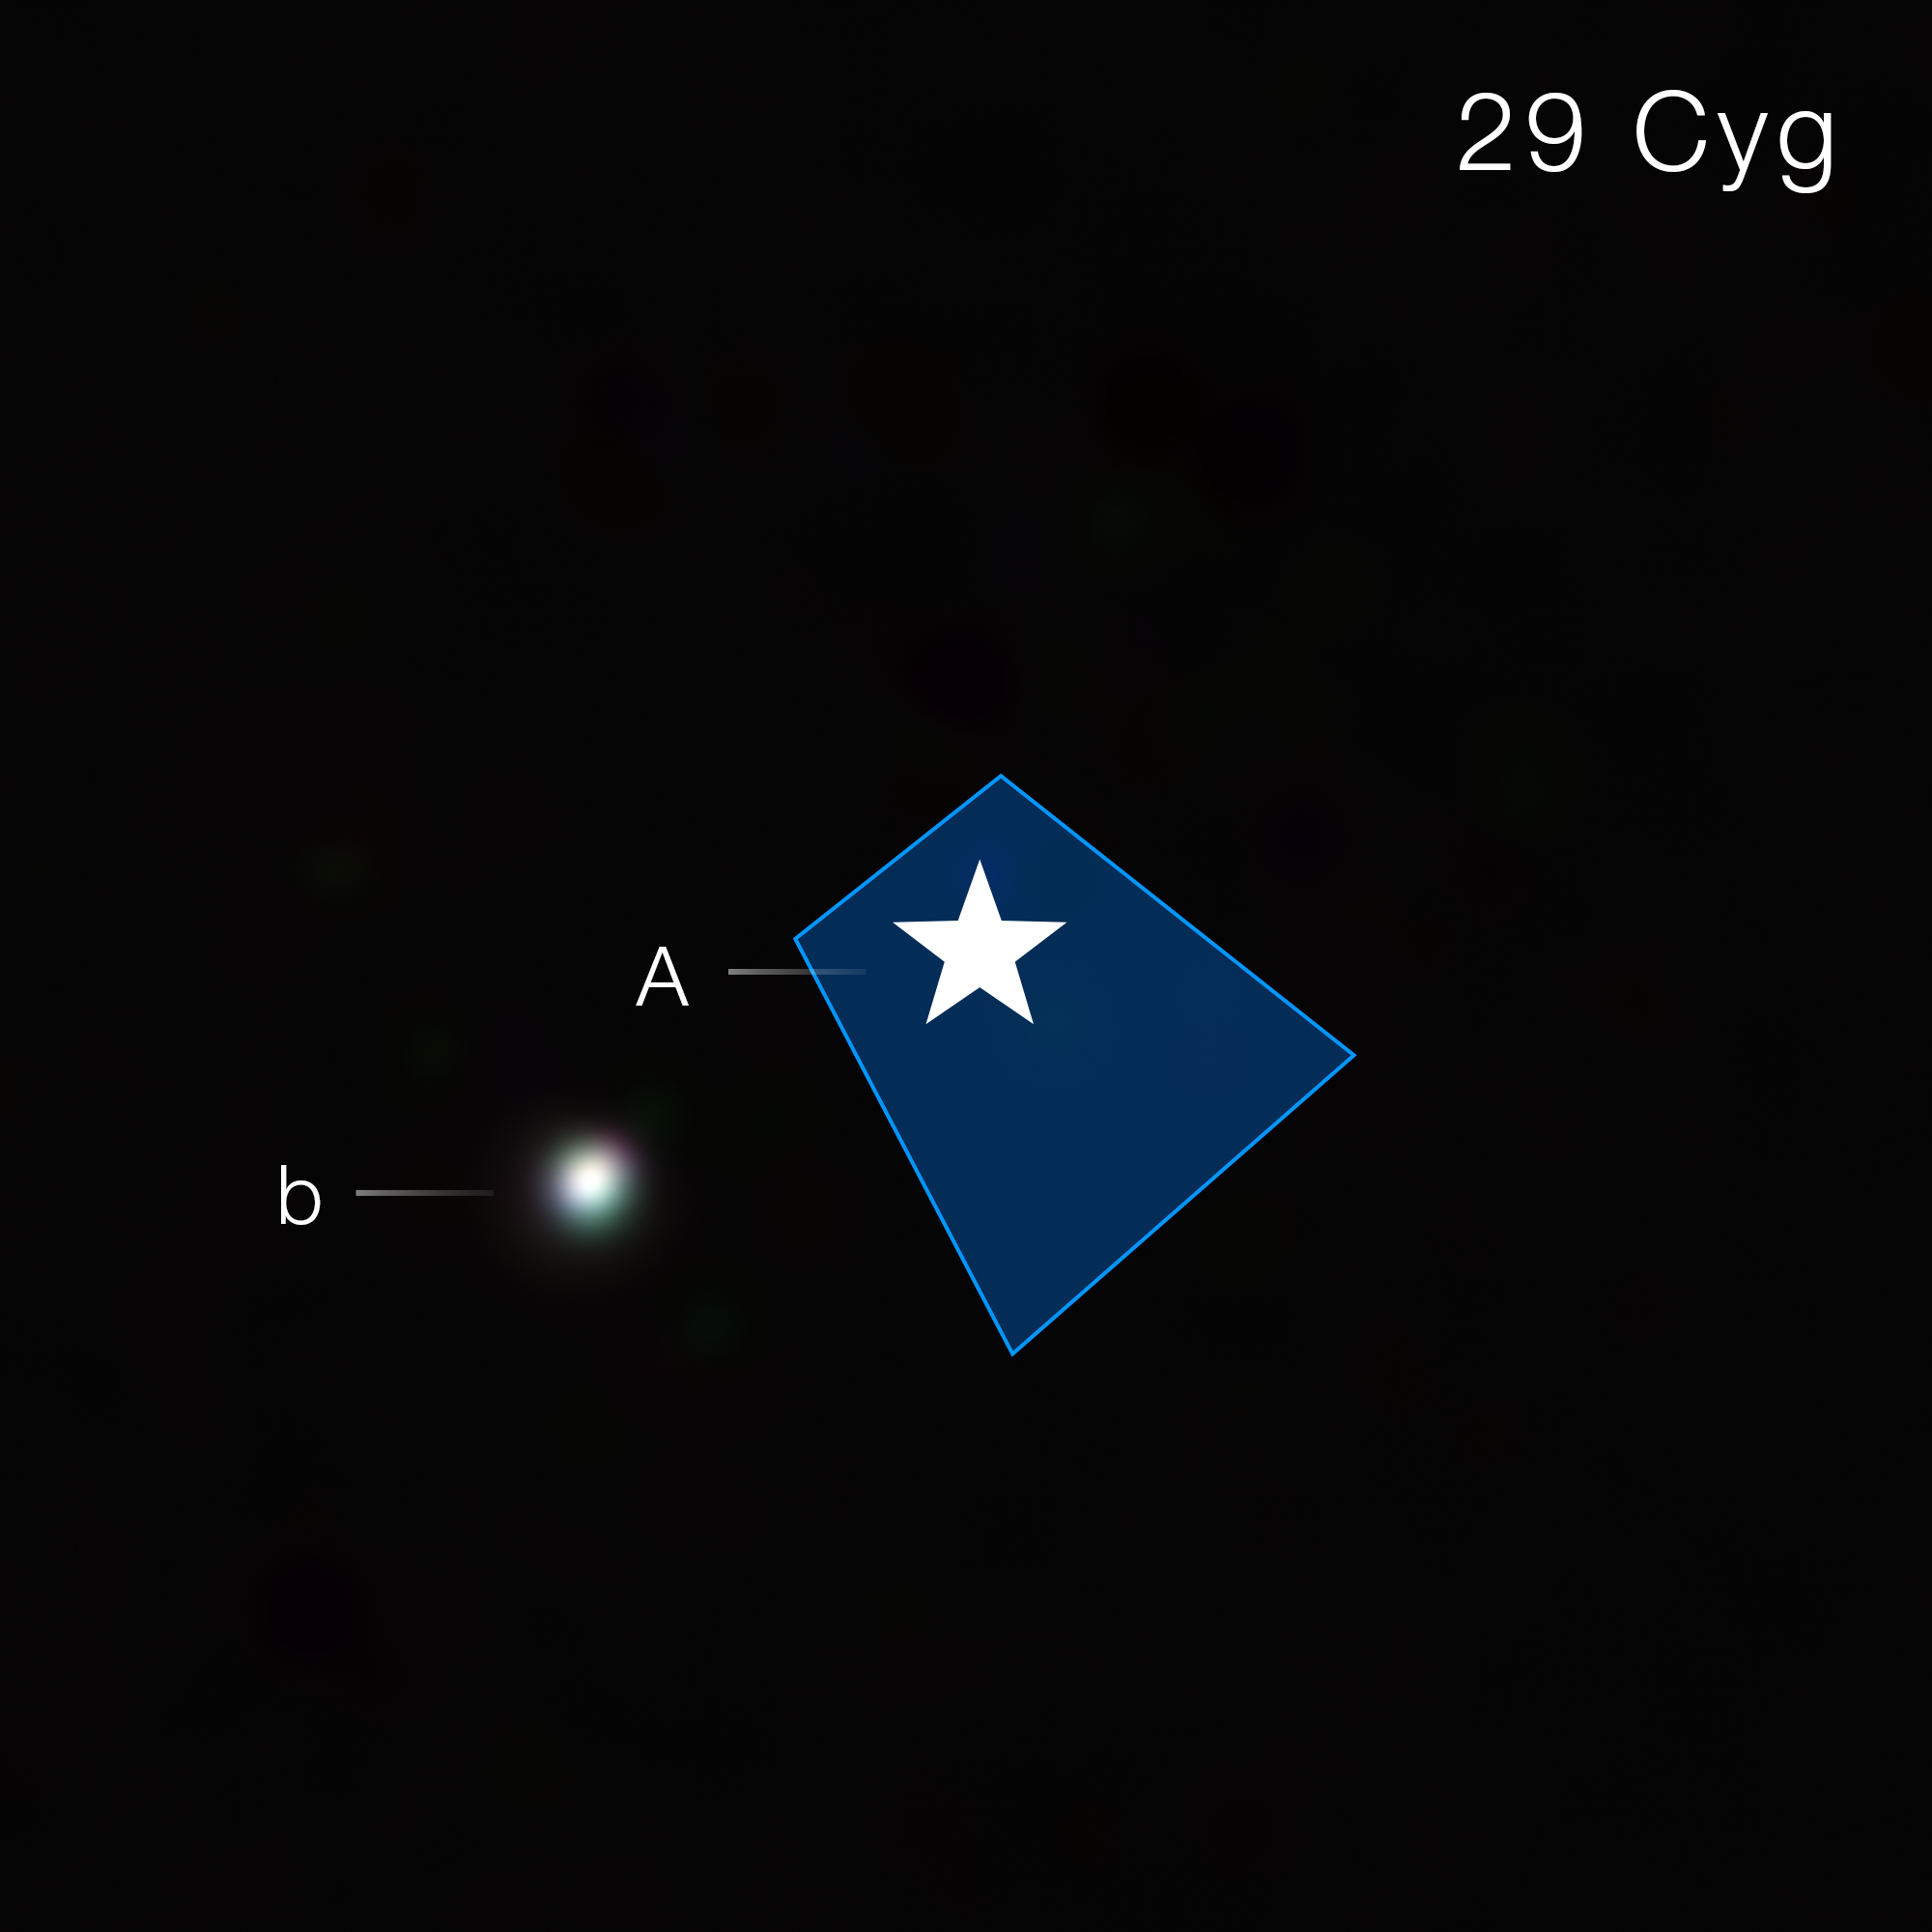

Exoplanet 29 Cygni b (NIRCam image)

Astronomers used the James Webb Space Telescope to directly image 29 Cygni b, which weighs 15 times Jupiter. They found evidence for heavy chemical elements like carbon and oxygen, which strongly suggests it formed like a planet by accretion within a protoplanetary disc, and not like a star through fragmentation.

Webb’s NIRCam (Near-Infrared Camera) was used in its coronagraphic mode, in which a wedge (indicated by the blue box) is used to block the light of the host star (labeled A and marked with a star symbol) to reveal the planet. This image combines light from three filters between 4 and 5 microns. The planet is brightest in the blue filter, then green, then red, so it appears as an off-white dot in the colour composite. If carbon dioxide weren’t present, the planet would appear noticeably redder.

In this image, the colour blue is assigned to 4.1 micron light, green to 4.3 micron light, and red to 4.6 micron light.

Credit: NASA, ESA, CSA, W. Balmer (JHU, STScI), L. Pueyo (STScI). Image processing: A. Pagan (STScI)